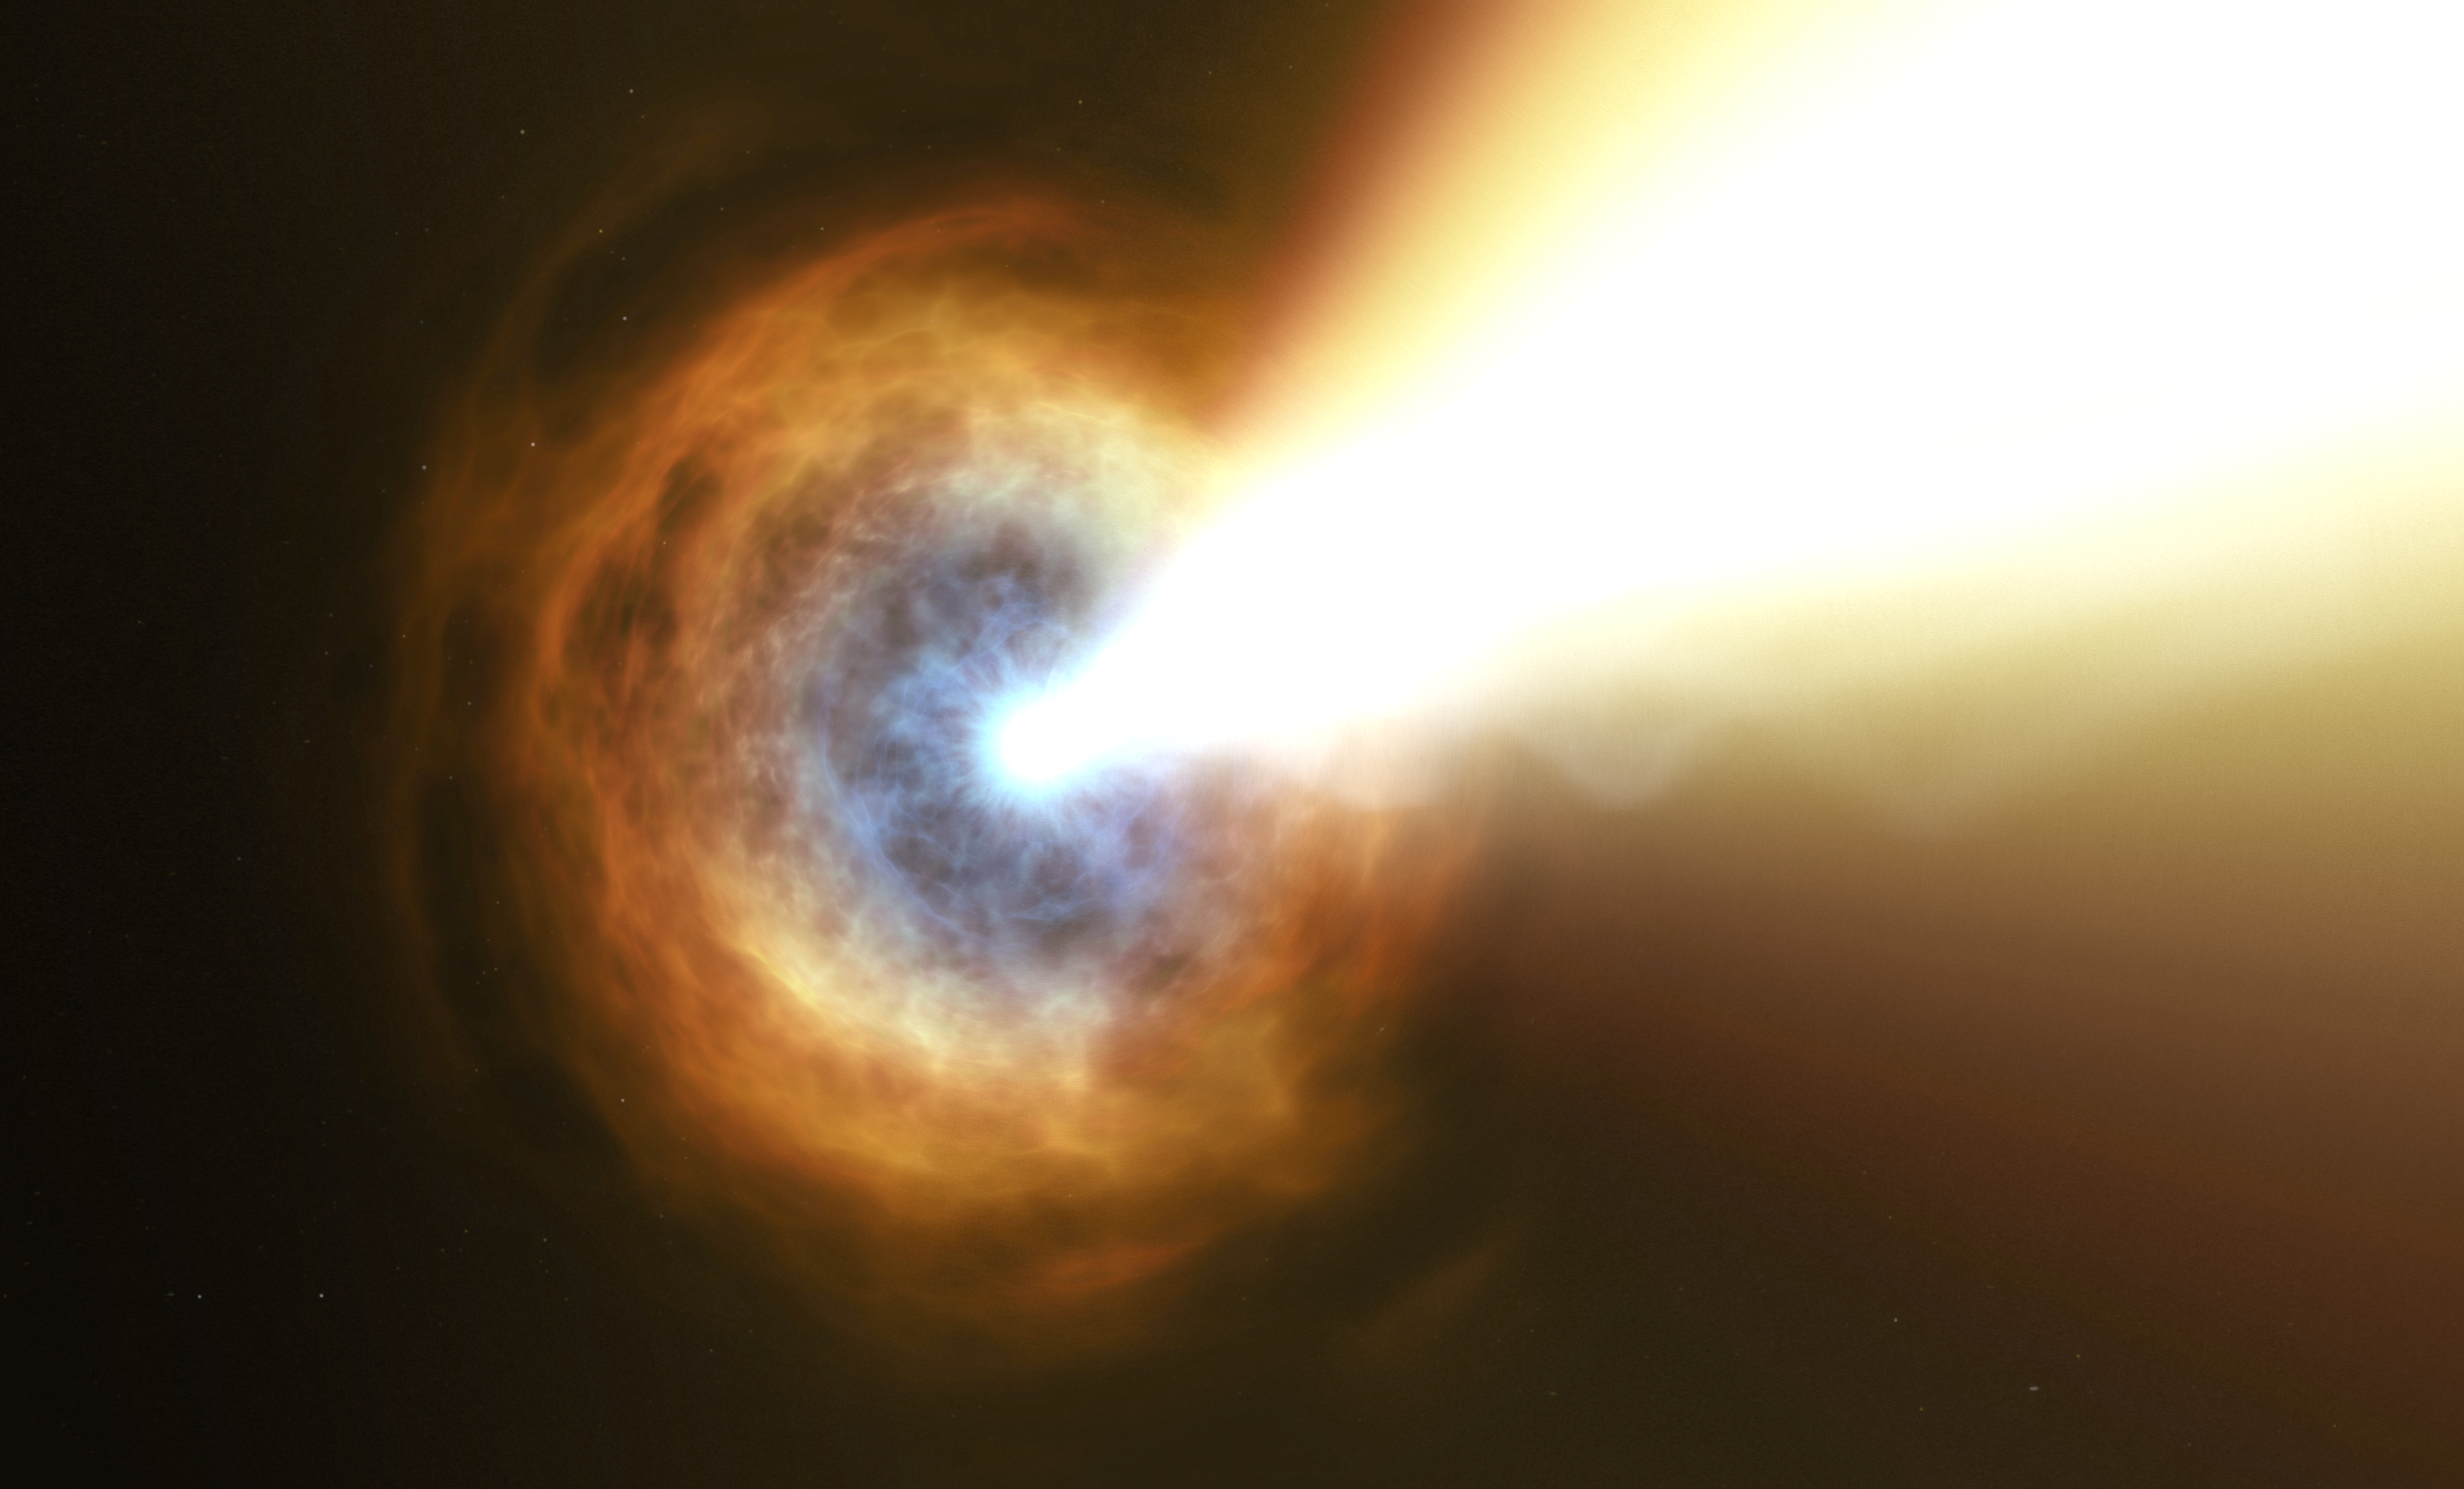

GRB 190114C (Artist’s Impression)

Gamma-ray bursts are the most powerful explosions in the Universe. They emit most of their energy in gamma rays, light which is much more energetic than the visible light we can see with our eyes.

Hubble’s observations suggest that this particular burst displayed such powerful emission because the collapsing star was sitting in a very dense environment, right in the middle of a bright galaxy 5 billion light years away.

Credit: ESA/Hubble, M. Kornmesser